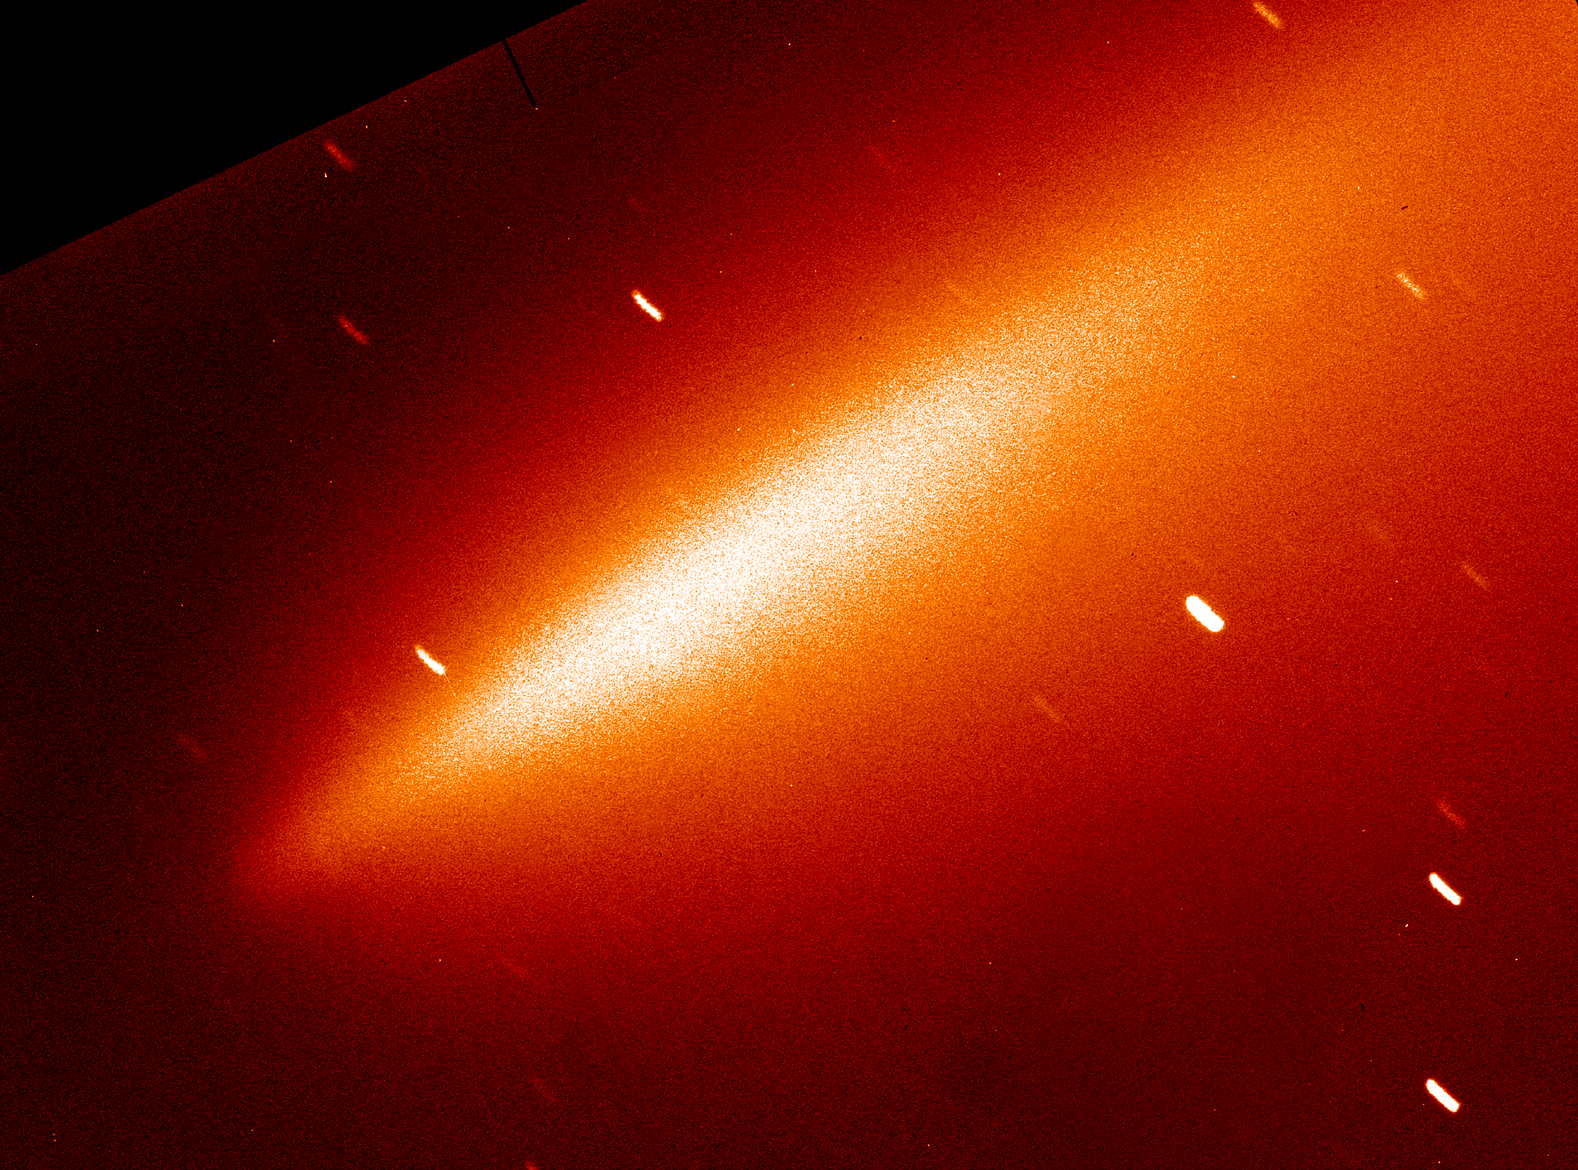

Comet Linear Fragments (Ground-Based View)

A ground-based telescopic view (2.2-meter telescope) of Comet LINEAR taken on August 5, at nearly the same time as the Hubble observations.

Credit: NASA/ESA, Harold Weaver (the Johns Hopkins University), and the HST Comet LINEAR Investigation Team.